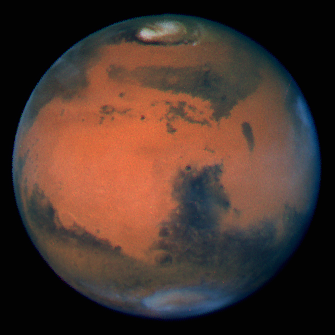

Mars at Opposition

Pictures of the planet Mars taken with the recently refurbished Hubble Space Telescope (HST) will provide the most detailed global view of the red planet ever obtained from Earth.

Credit: David Crisp and the WFPC2 Science Team (Jet Propulsion Laboratory/California Institute of Technology)